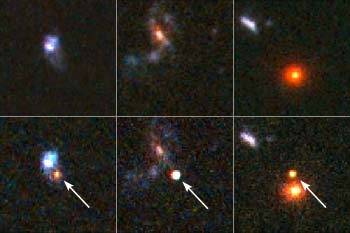

Hubble Spots Distant Supernovae in Search of Properties of Dark Energy

These are images of three of the most distant supernovae known, discovered using the Hubble Space Telescope as a supernova search engine. The stars exploded back when the universe was approximately half its current age. The light is just arriving at Earth now. Supernovae are so bright they can be seen far away and far back in time. This allows astronomers to trace the expansion rate of the universe, and to determine how it is affected by the repulsive push of dark energy, an unknown form of energy that pervaded space.

Credit: NASA/ESA and A. Riess (STScI)